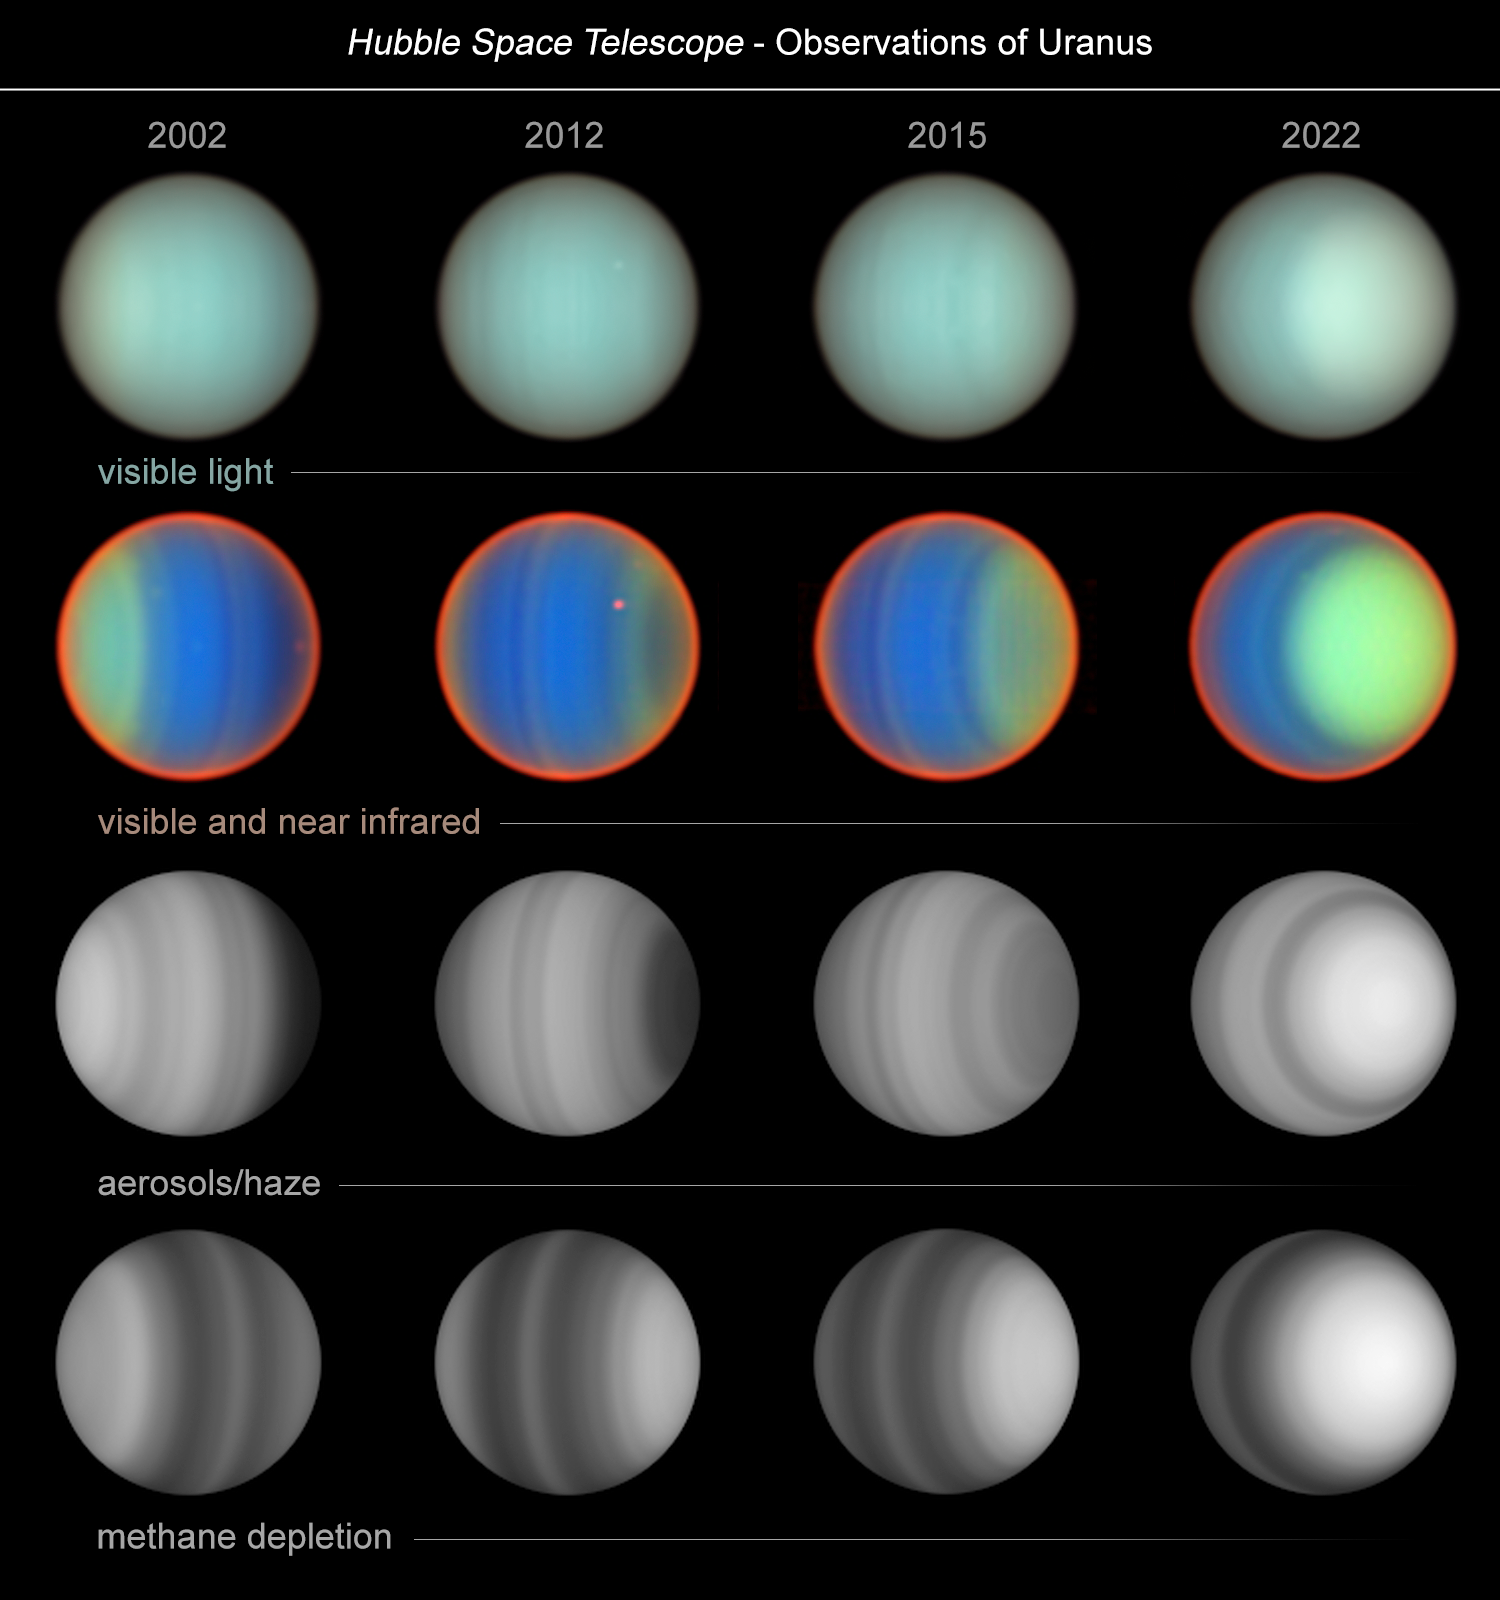

20 years of Uranus observations

The ice-giant planet Uranus, which travels around the Sun tipped on its side, is a weird and mysterious world. Now, in an unprecedented study spanning two decades, researchers using the NASA/ESA Hubble Space Telescope have uncovered new insights into the planet's atmospheric composition and dynamics. This was possible only because of Hubble’s sharp resolution, spectral capabilities, and longevity.

The team observed Uranus four times in a 20-year period: in 2002, 2012, 2015, and 2022. They found that, unlike conditions on the gas giants Saturn and Jupiter, methane is not uniformly distributed across Uranus. Instead, it is strongly depleted near the poles. This depletion remained relatively constant over the two decades. However, the aerosol and haze structure changed dramatically, brightening significantly in the northern polar region as the planet approaches its northern summer solstice in 2030.

The image columns show the change of Uranus for the four years that the STIS instrument observed Uranus across a 20-year period. Over that span of time, the researchers watched the seasons of Uranus as the south polar region darkened going into winter shadow while the north polar region brightened as northern summer approaches.

Credit: NASA, ESA, E. Karkoschka (LPL)